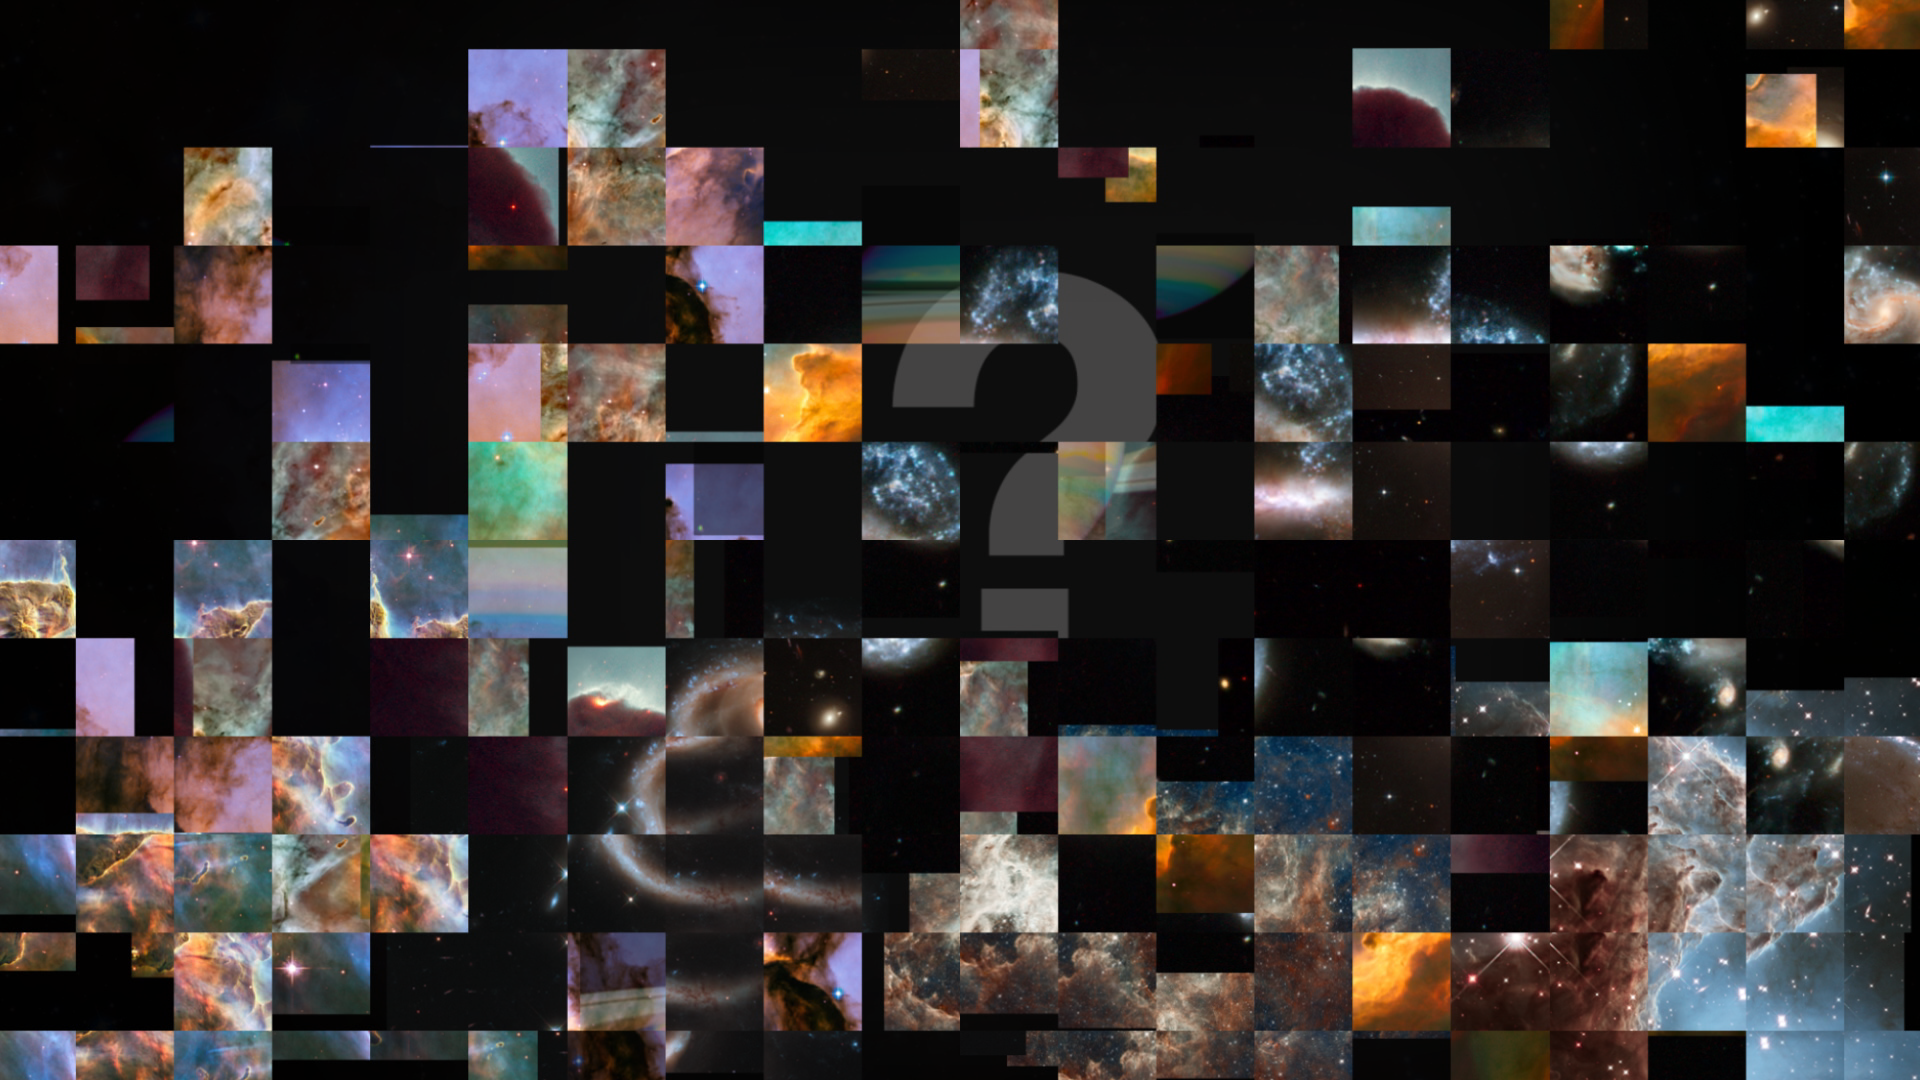

Still from Hubblecast Episode 84: A starry snapshot for Hubble’s 25th

This is a still from Hubblecast 84 which browses the history of Hubble’s anniversary images and explores the newest addition: the star cluster Westerlund 2.

Credit: NASA, ESA